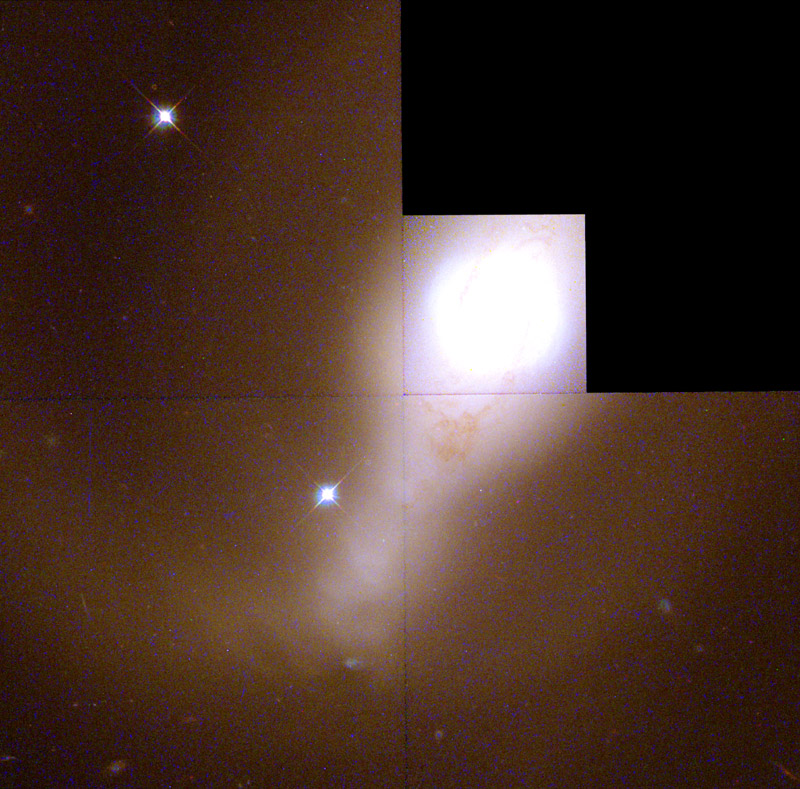

Galaxy NGC 4314 (Hubble WFPC2 Mosaic)

The two spiral arms outside the ring are probably unrelated to the dust lanes, and seem to contain very little dust or gas. The stars in these spiral arms are bluer than most of the galaxy, indicating that many of them are relatively young, less than 200 million years old. However, they are older than those in the ring. This information suggests that the neighborhood of star formation is moving closer to the galaxy's core. Another interpretation has the arms formed through the gravitational interaction of the embedded bar and ring of stars, causing them to spray outward.

Credit: G. Fritz Benedict, Andrew Howell, Inger Jorgensen, David Chapell (University of Texas), Jeffery Kenney (Yale University), and Beverly J. Smith (CASA, University of Colorado), and NASA/ESA